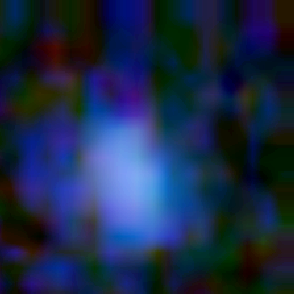

Galaxy building blocks

This is one Proto Galaxy out of a series of 18, taken by the Wide Field Planetary Camera 2.

Credit: Rogier Windhorst and Sam Pascarelle (Arizona State University) and NASA/ESA